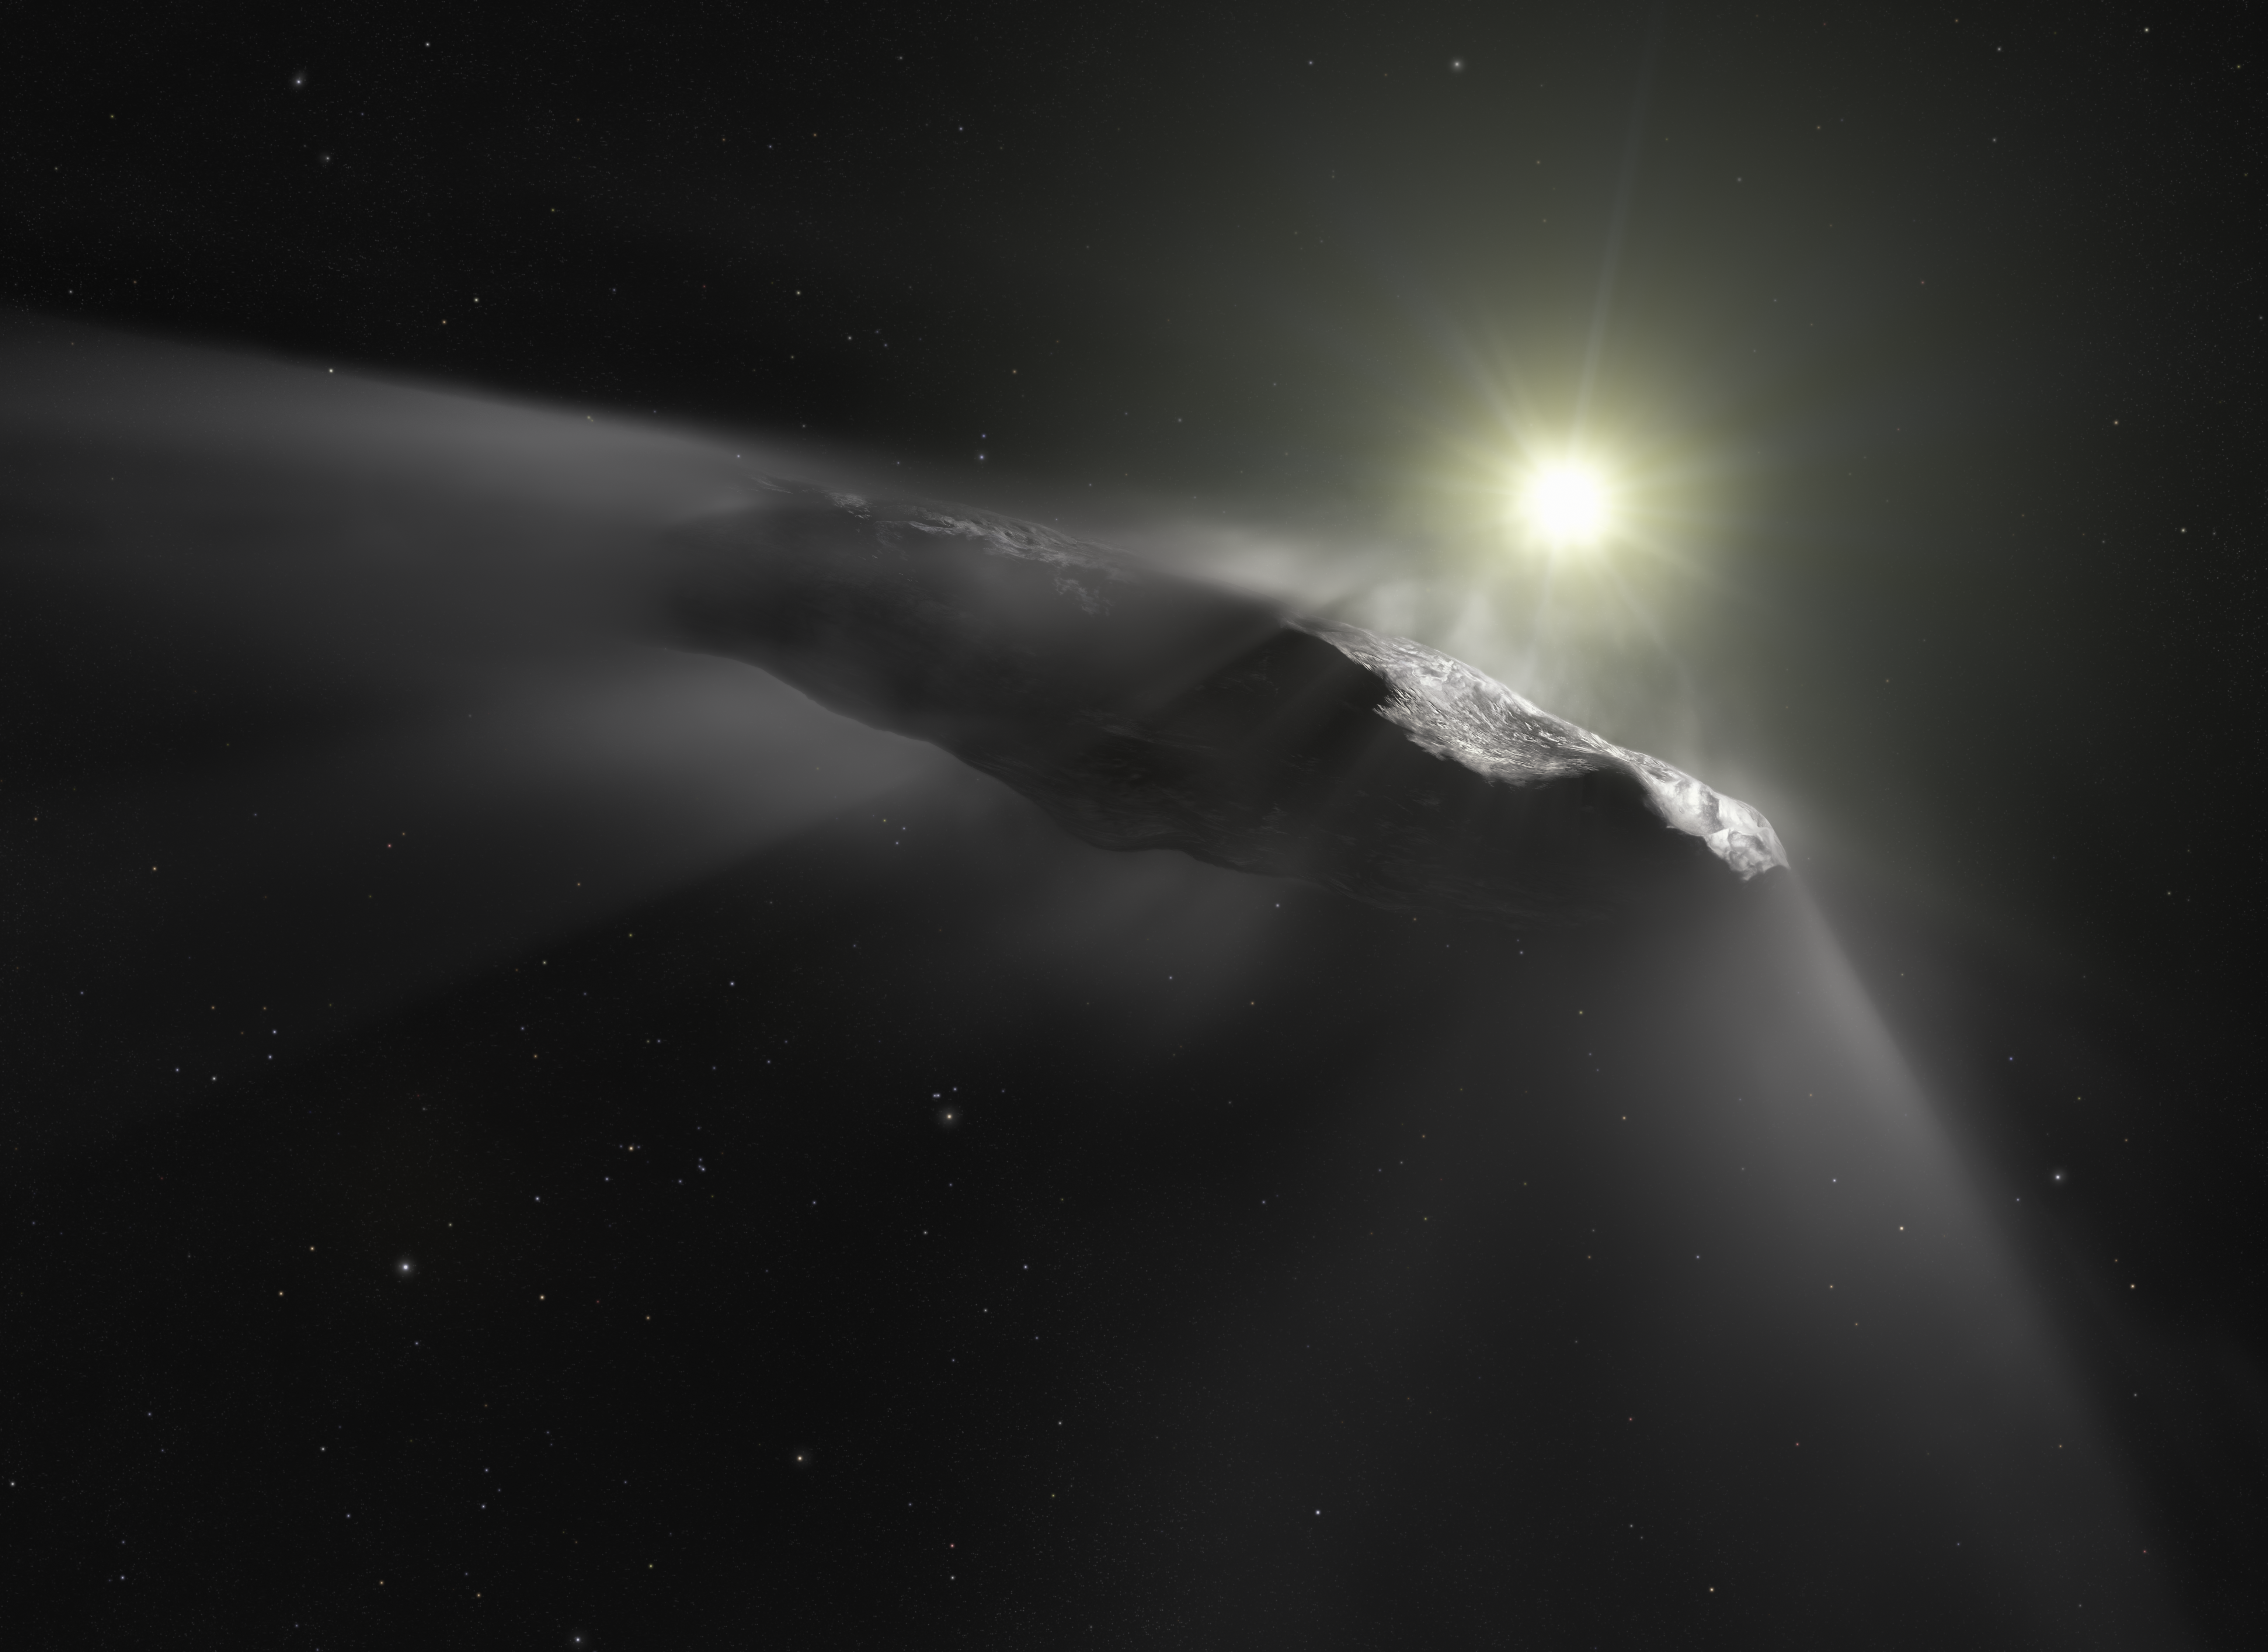

Artist’s impression of the interstellar asteroid `Oumuamua

This artist’s impression shows the first interstellar object discovered in the Solar System, `Oumuamua. Observations made with the NASA/ESA Hubble Space Telescope and others show that the object is moving faster than predicted while leaving the Solar System.

Researchers assume that venting material from its surface due to solar heating is responsible for this behaviour. This outgassing can be seen in this artist’s impression as a subtle cloud being ejected from the side of the object facing the Sun.

As outgassing is a behaviour typical for comets, the team thinks that `Oumuamua’s previous classification as an interstellar asteroid has to be corrected.

Credit: ESA/Hubble, NASA, ESO, M. Kornmesser